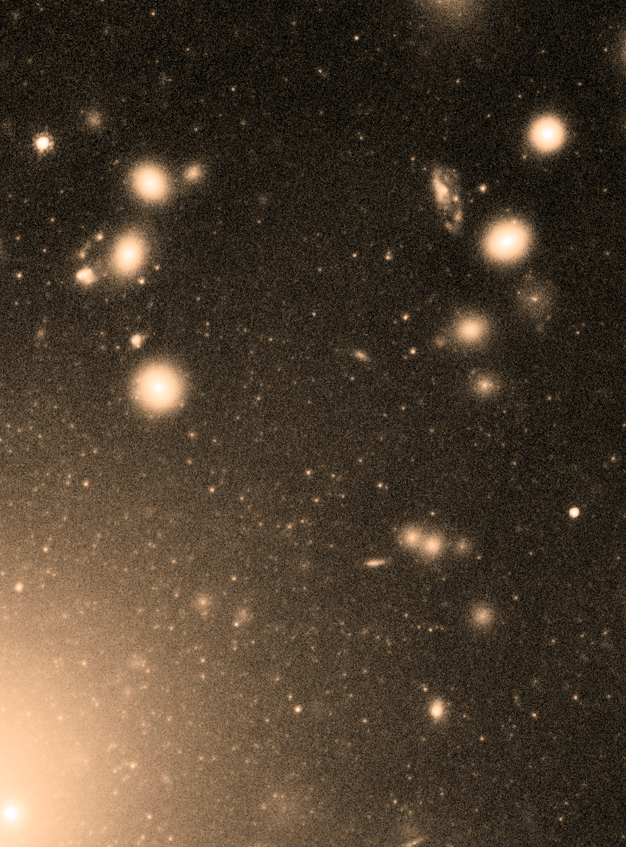

A snapshot of Abell 1689's globular clusters

Peering deep into the heart of the massive galaxy cluster Abell 1689, the NASA/ESA Hubble Space Telescope recently spied some 10 000 globular clusters. From this, the astronomers estimate that this galaxy cluster could possibly contain over 160 000 globulars overall, the largest population ever found. By comparison, our galaxy, the Milky Way, hosts about 150 such clusters.

Globular clusters are dense collections of hundreds of thousands of stars – some of the oldest surviving stars in the Universe.

This view zooms into the region of this cluster that has been found to be packed with globular clusters. They appear as thousands of tiny white dots, like a blizzard of snowflakes. The larger white blobs are entire galaxies full of stars.

Credit: NASA, ESA, J. Blakeslee (NRC Herzberg Astrophysics Program, Dominion Astrophysical Observatory), and K. Alamo-Martinez (National Autonomous University of Mexico) Acknowledgment: H. Ford (JHU)